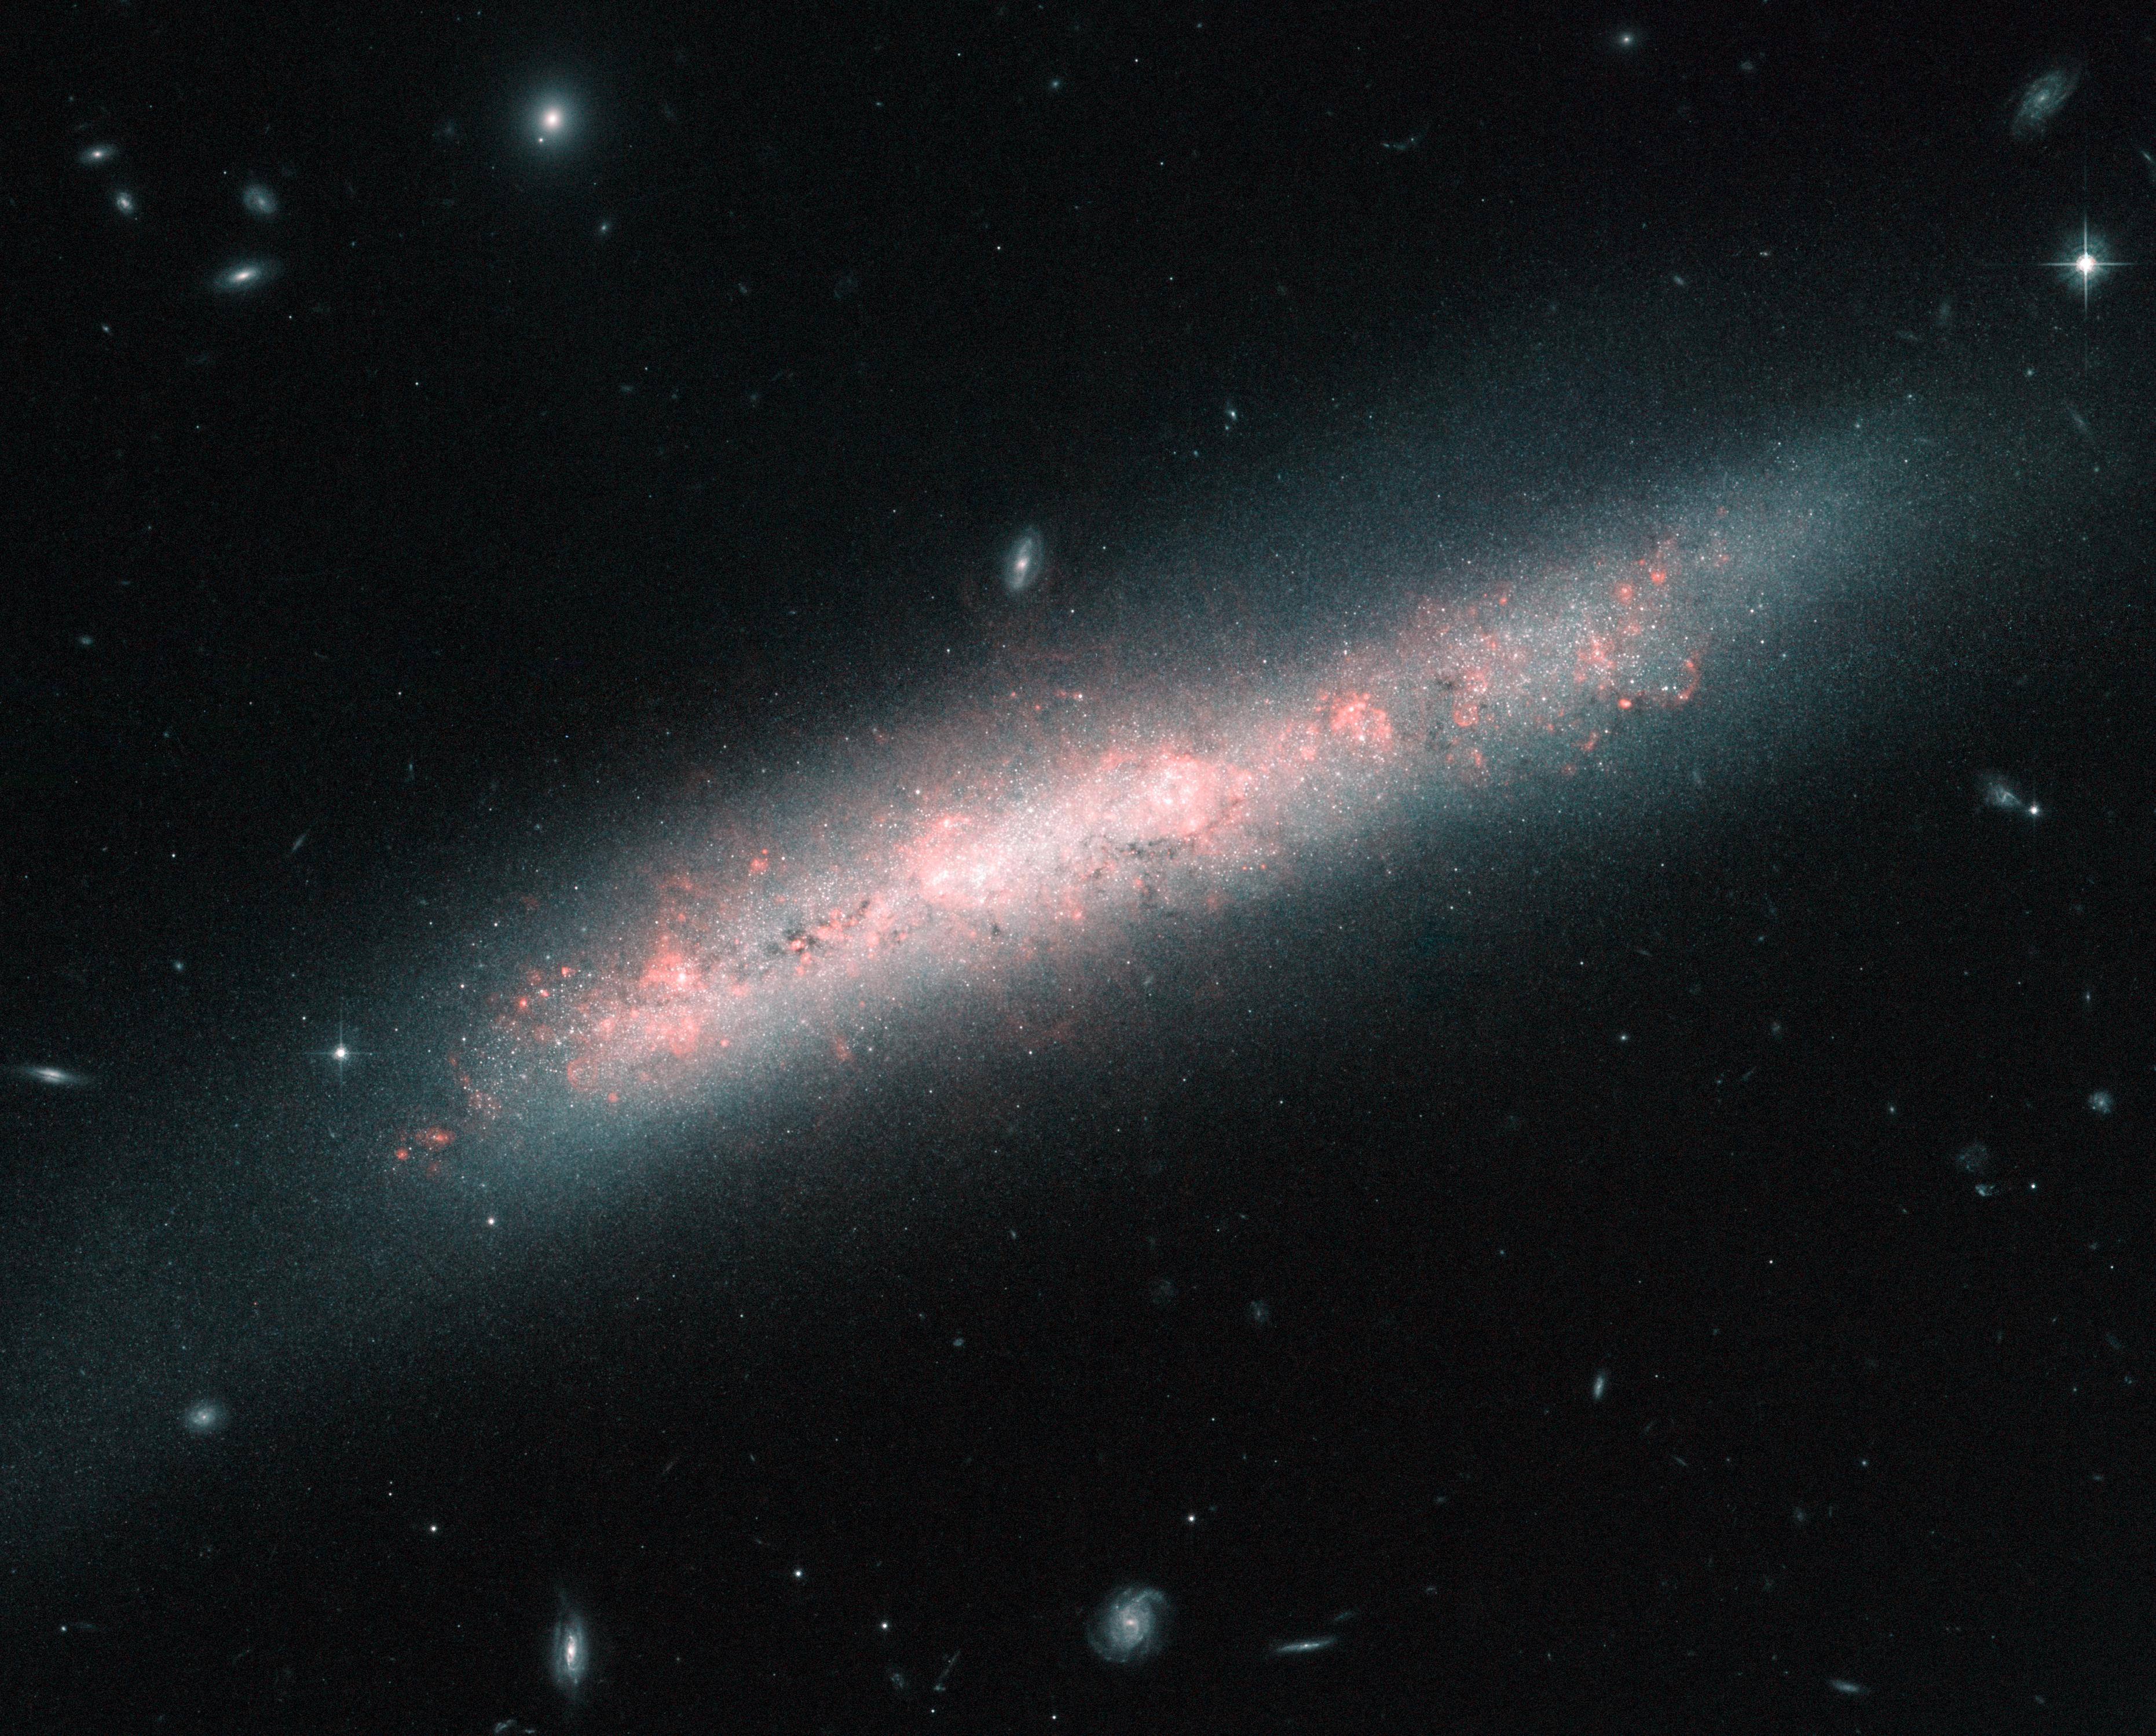

A galaxy festooned with stellar nurseries

The galaxy NGC 4700 bears the signs of the vigorous birth of many new stars in this image captured by the NASA/ESA Hubble Space Telescope.

The many bright, pinkish clouds in NGC 4700 are known as H II regions, where intense ultraviolet light from hot young stars is causing nearby hydrogen gas to glow. H II regions often come part-and-parcel with the vast molecular clouds that spawn fresh stars, thus giving rise to the locally ionised gas.

In 1610, French astronomer Nicolas-Claude Fabri de Peiresc peered through a telescope and found what turned out to be the first H II region on record: the Orion Nebula, located relatively close to our Solar System here in the Milky Way. Astronomers study these regions throughout the Milky Way and those easily seen in other galaxies to gauge the chemical makeup of cosmic environments and their influence on the formation of stars.

NGC 4700 was discovered back in March 1786 by the British astronomer William Herschel who noted it as a “very faint nebula”. NGC 4700, along with many other relatively close galaxies, is found in the constellation of Virgo (The Virgin) and is classified as a barred spiral galaxy, similar in structure to the Milky Way. It lies about 50 million light-years from us and is moving away from us at about 1400 km/second due to the expansion of the Universe.

Credit: ESA/Hubble & NASA